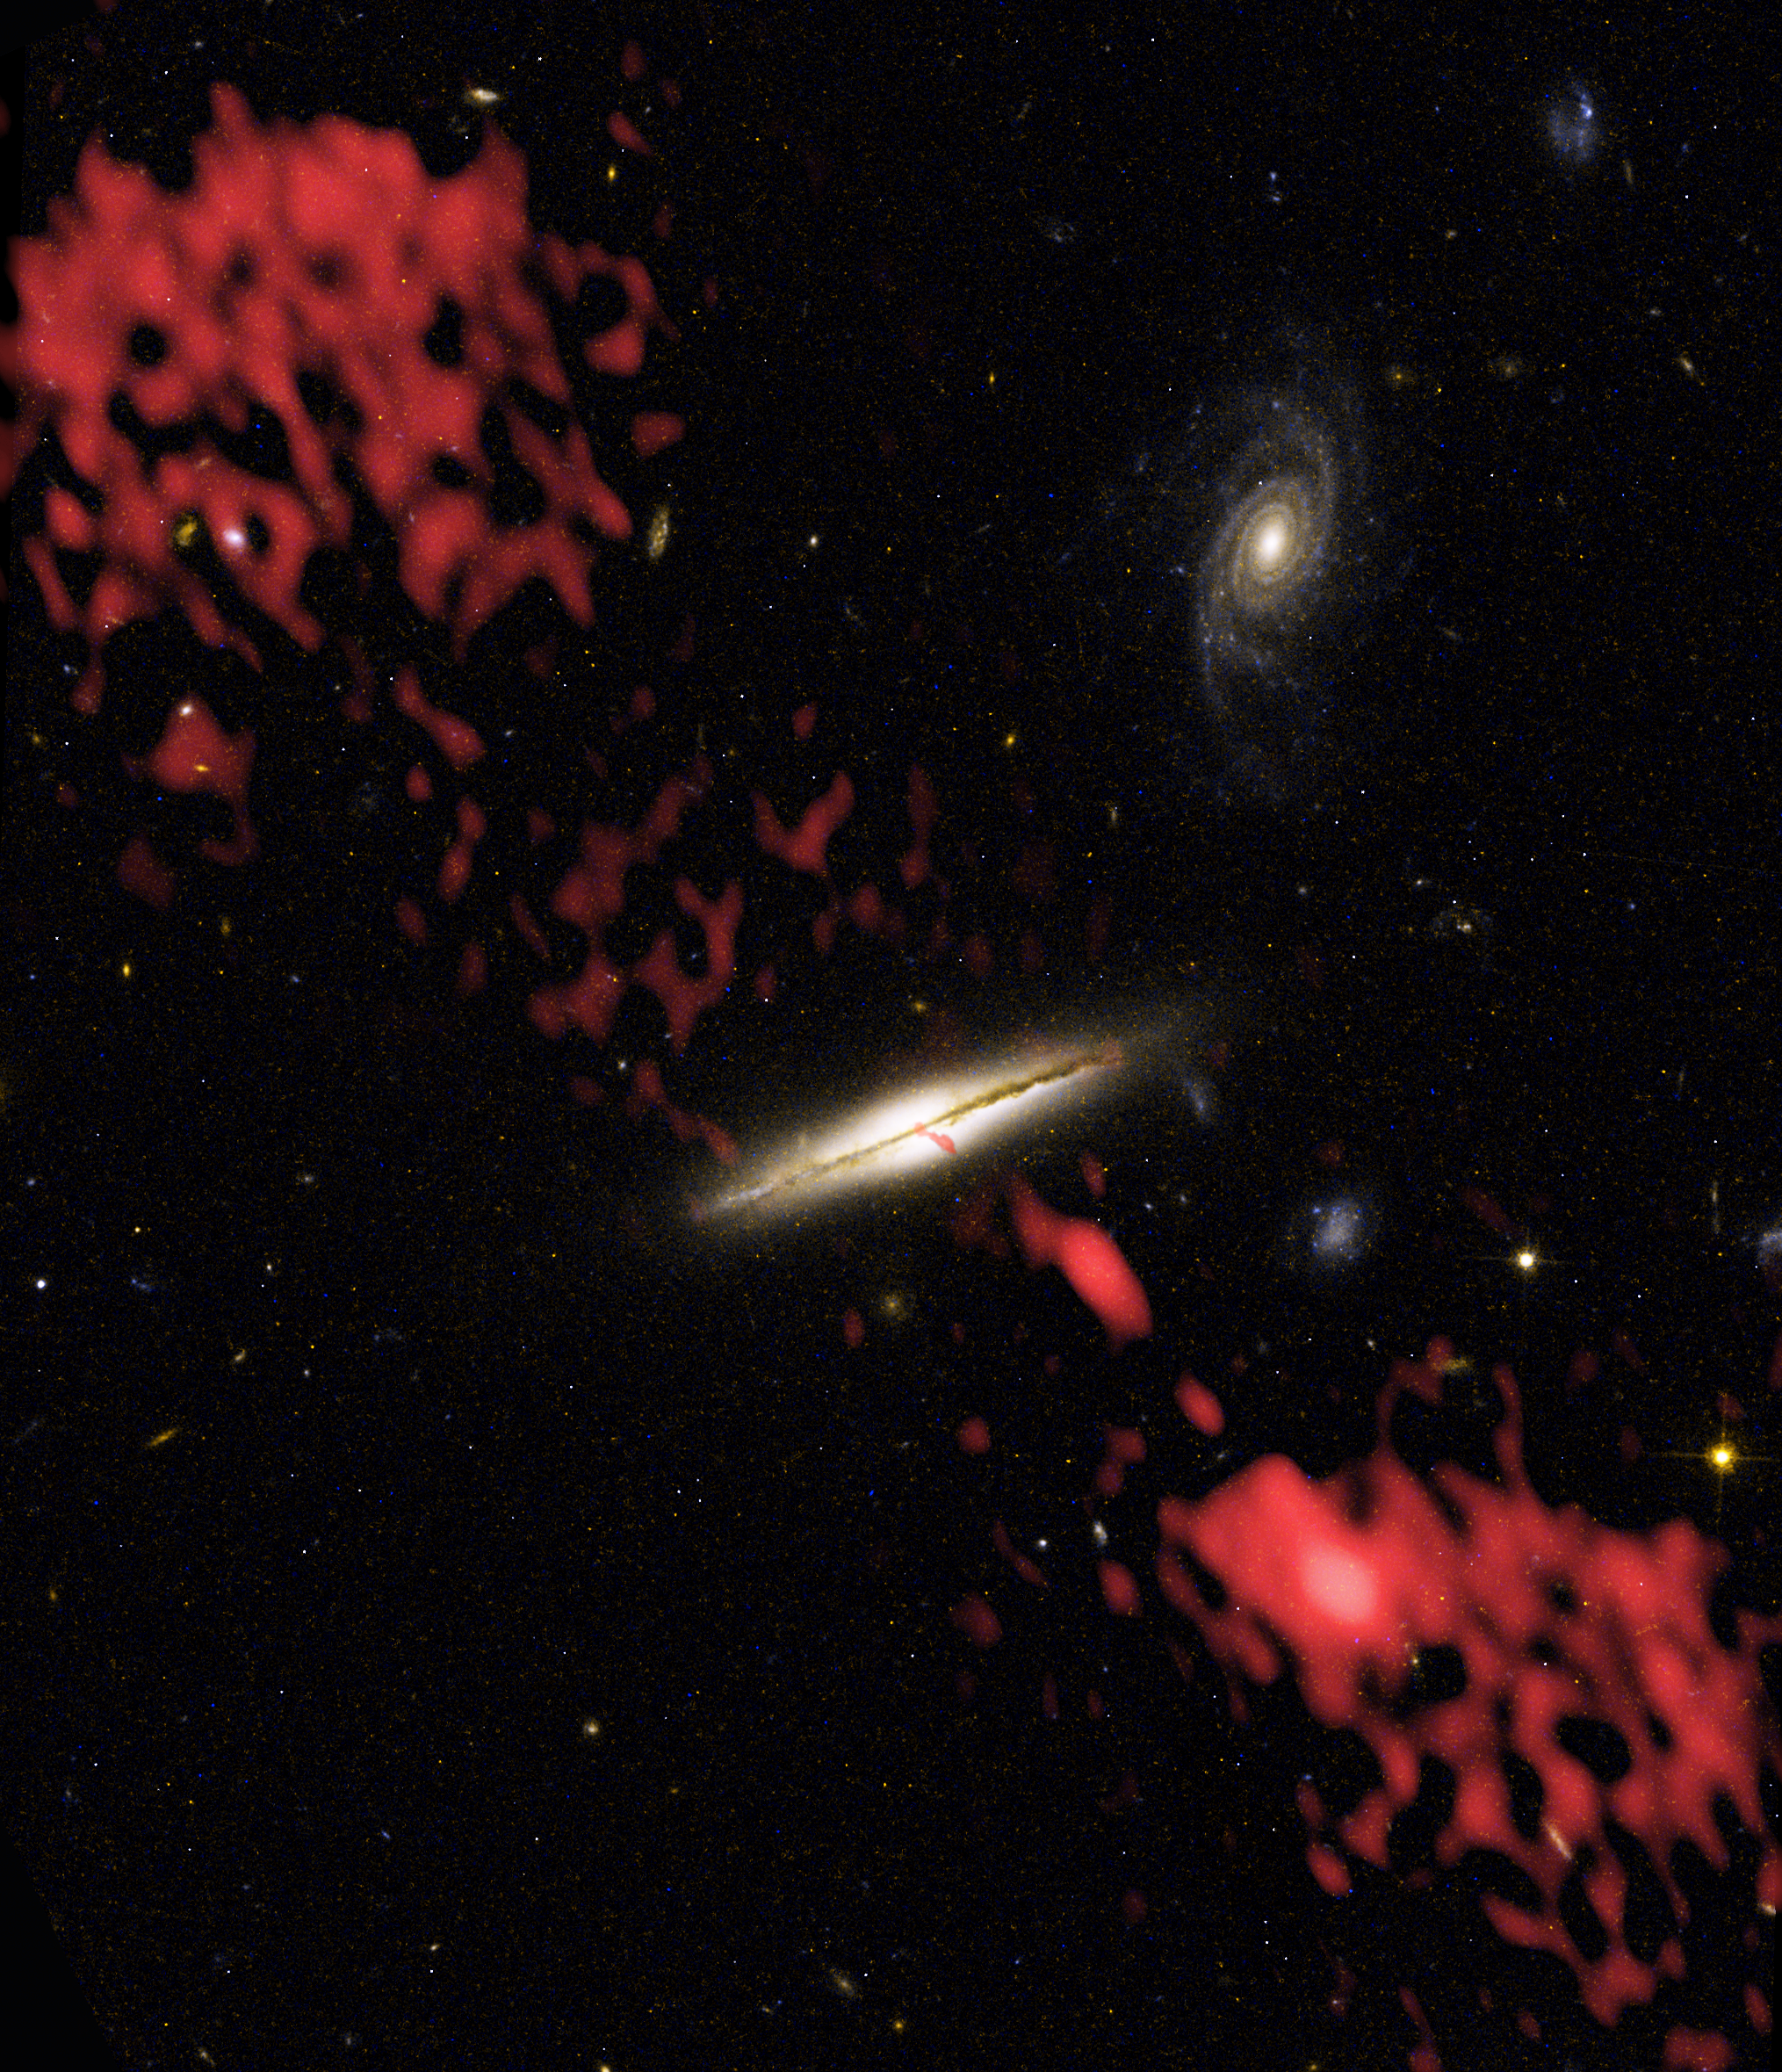

Wide View of 0313-192

Giant jets of subatomic particles moving at nearly the speed of light have been found coming from thousands of galaxies across the Universe, but always from elliptical galaxies or galaxies in the process of merging. However, using the combined power of NASA's Hubble Space Telescope, the Very Large Array (radio observatory) and the 8-meter Gemini-South Telescope, astronomers discovered a huge jet coming from a spiral galaxy similar to our own Milky Way. Composite images show the galaxy, called 0313-192, which is the first spiral galaxy known to be producing a giant radio-emitting jet.

Credit: NASA/ESA, NRAO/AUI/NSF and W. Keel (University of Alabama, Tuscaloosa)